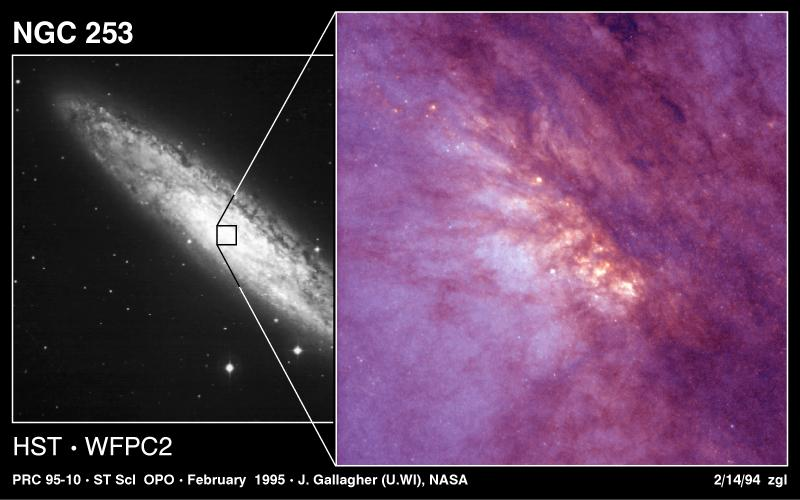

NGC 253

These images show the spiral galaxy NGC 253. This galaxy is host for massive starbirth.

Credit: Jay Gallagher (University of Wisconsin-Madison), Alan Watson (Lowell Observatory, Flagstaff, AZ) and NASA/ESA